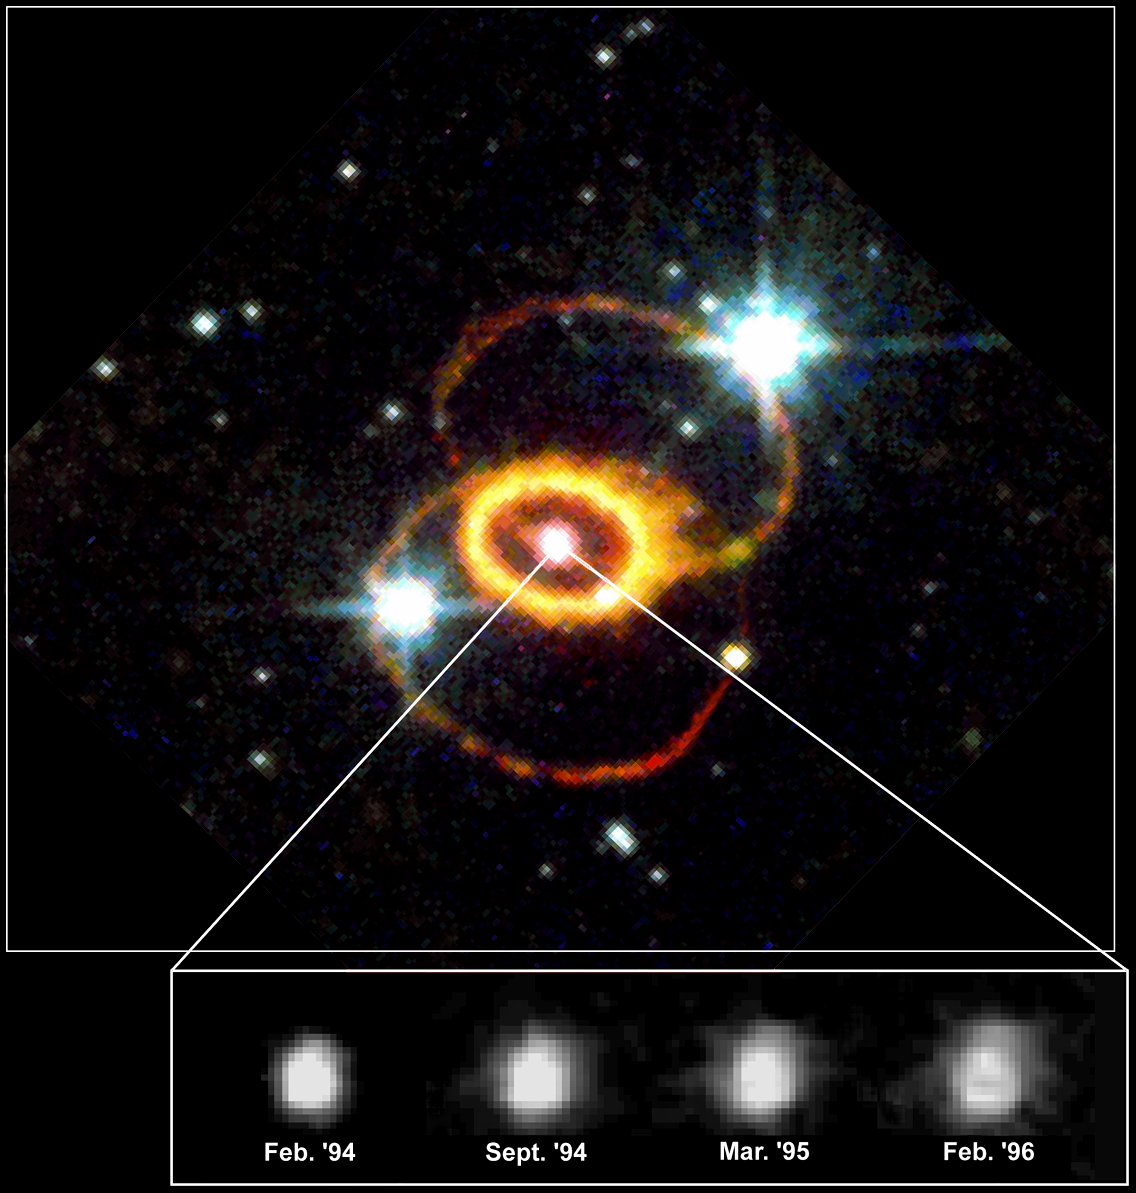

Hubble Reveals Structure Of Supernova 1987a Explosion Debris

This Hubble Space Telescope picture shows Supernova 1987A and its neighborhood. The series of four panels shows the evolution of the SN 1987A debris from February 1994 to February 1996. Material from the stellar interior was ejected into space during the supernova explosion in February 1987. The explosion debris is expanding at nearly 6 million miles per hour (about 2680 kilometres per second).

Credit: Chun Shing Jason Pun (NASA/ESA/GSFC), Robert P. Kirshner (Harvard-Smithsonian Center for Astrophysics), and NASA/ESA